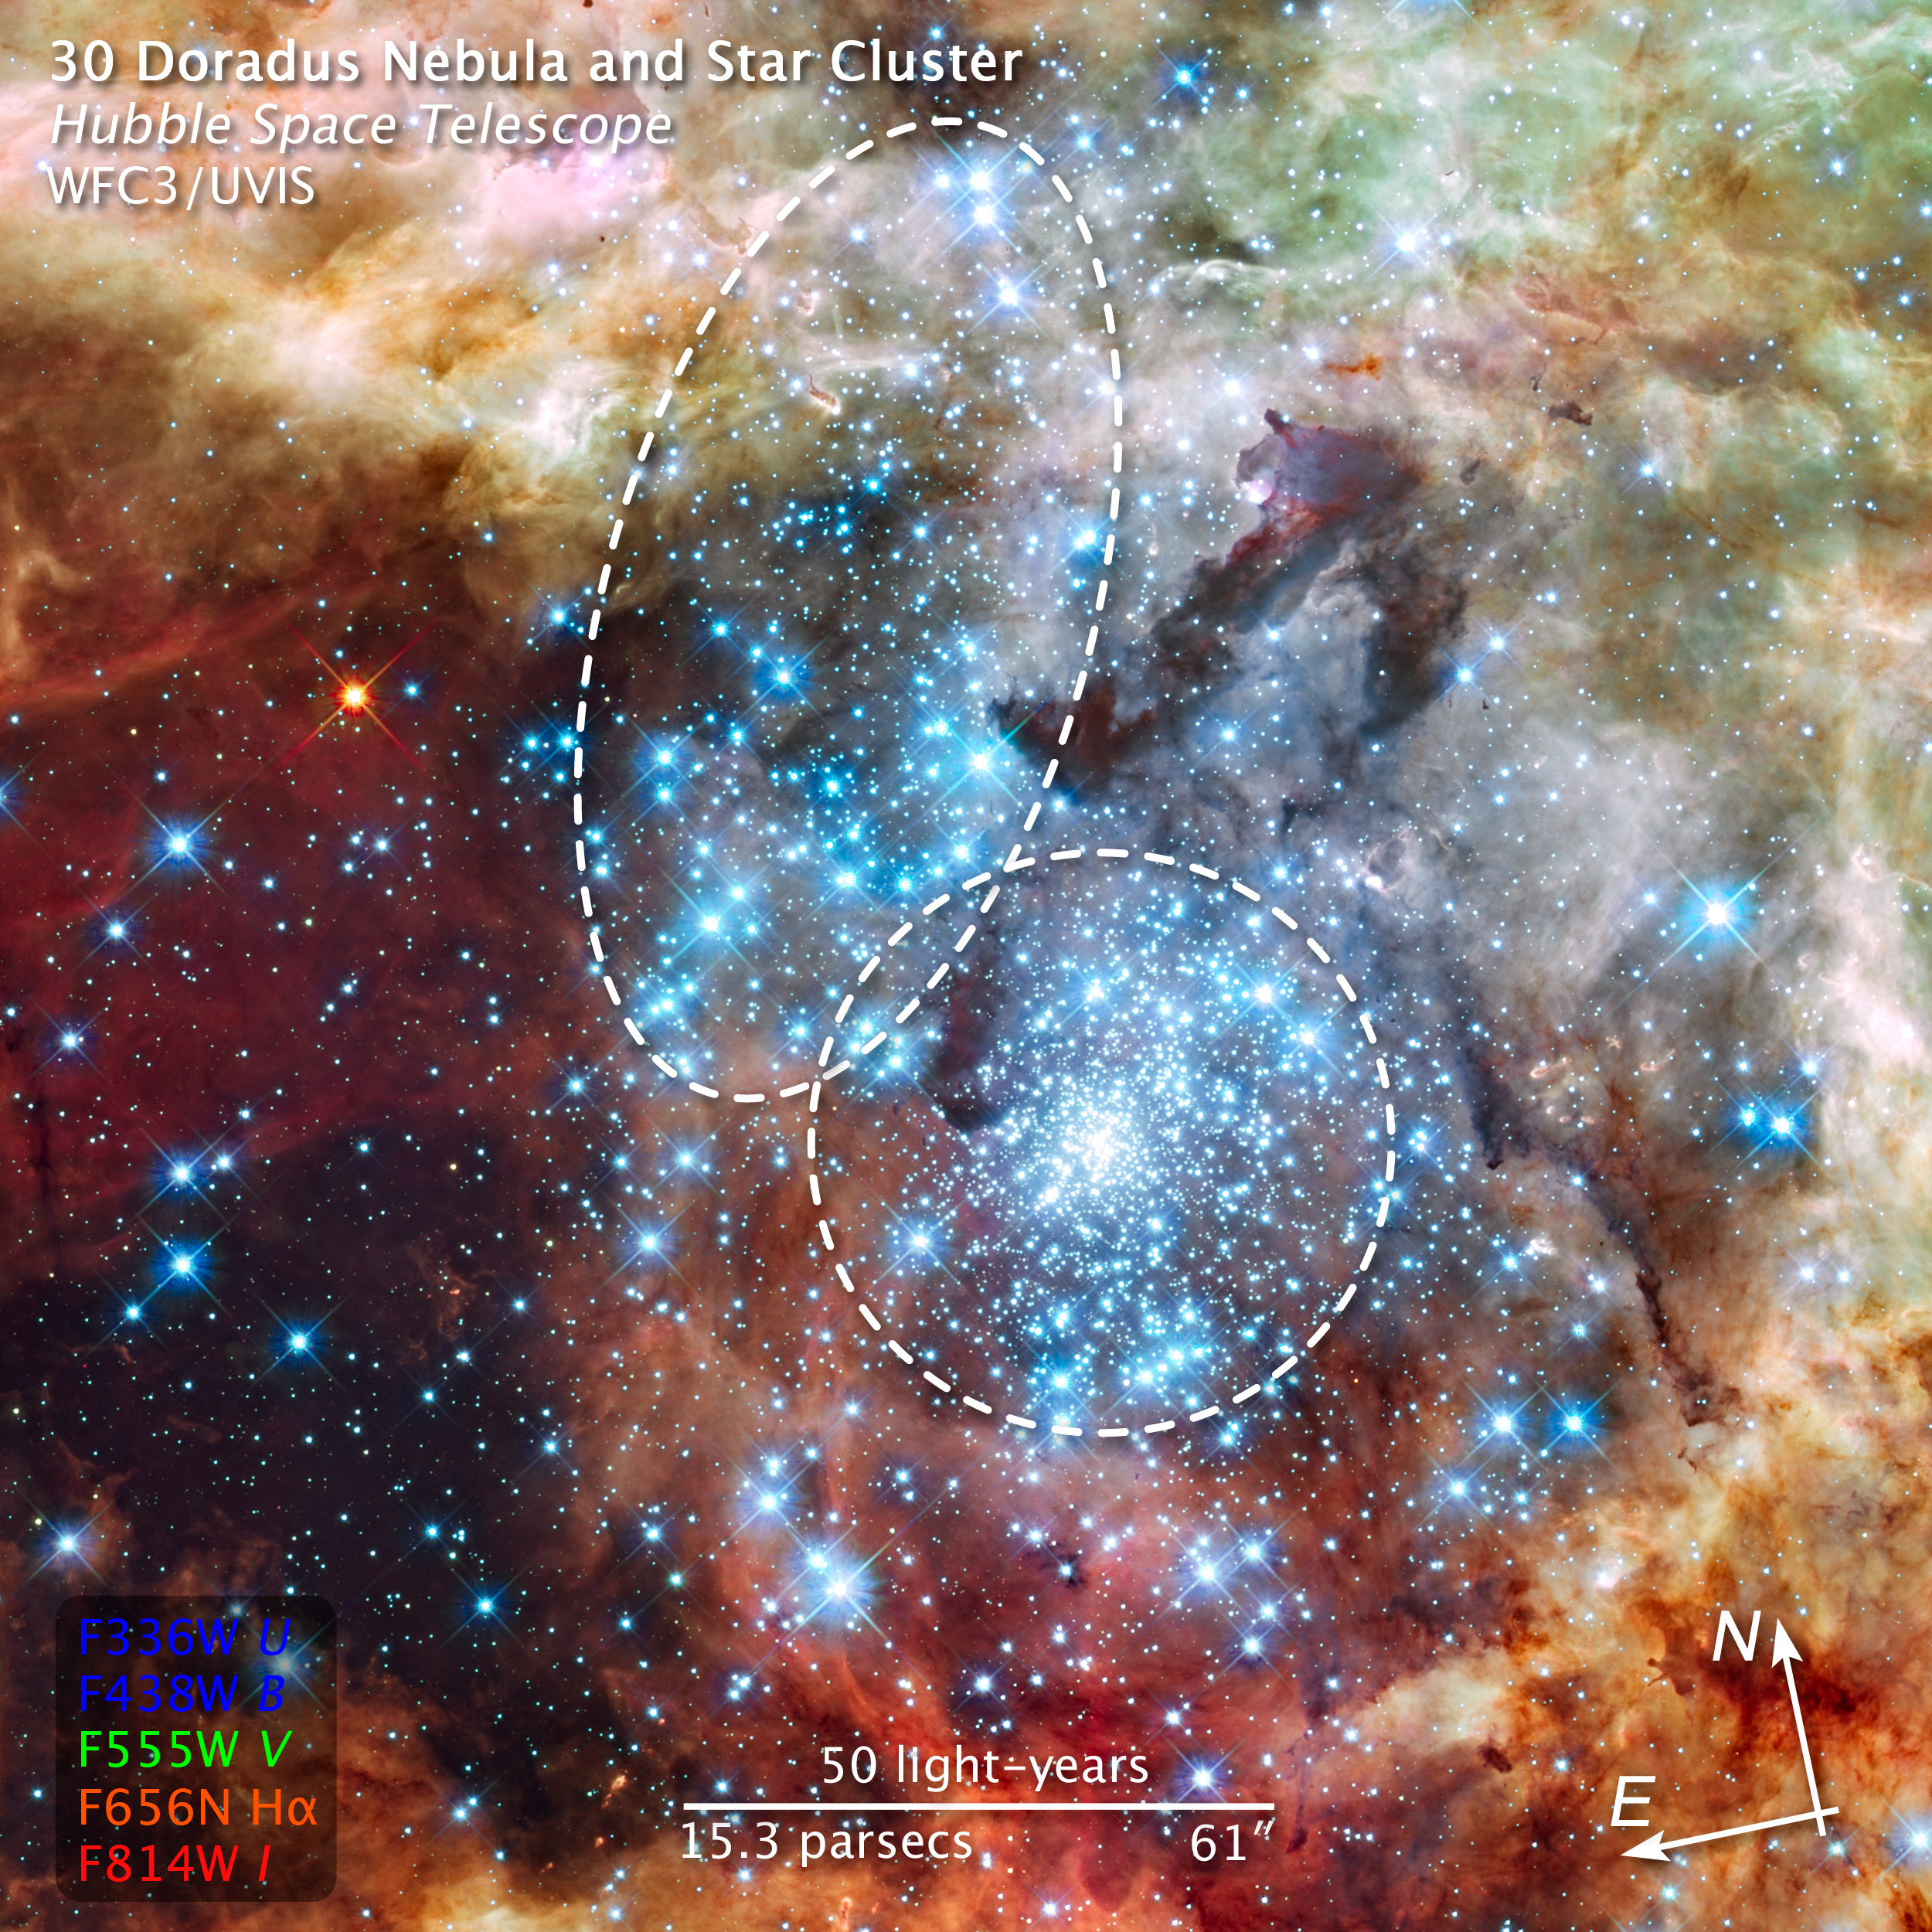

Compass and scale image of merging star clusters in 30 Doradus

This is a Hubble Space Telescope image of a pair of star clusters that are believed to be in the early stages of merging. The clusters lie in the gigantic 30 Doradus Nebula, which is 170,000 light-years from Earth.

Hubble's circumstantial evidence for the impending collision comes from seeing an elongated structure in the cluster at upper left, and from measuring a different age between the two clusters. Also, the unusually large number of high-velocity stars around 30 Doradus can finally be explained if a small cluster has merged into the big cluster R136 in the center of the Tarantula Nebula.

This nearby example of cluster interaction yields insights into how star clusters may have formed in the early Universe.

The Hubble observations, made with the Wide Field Camera 3, were taken 20-27 October, 2009. The blue colour is light from the hottest, most massive stars; the green from the glow of oxygen; and the red from fluorescing hydrogen.

Credit: NASA, ESA, and Z. Levay (STScI)